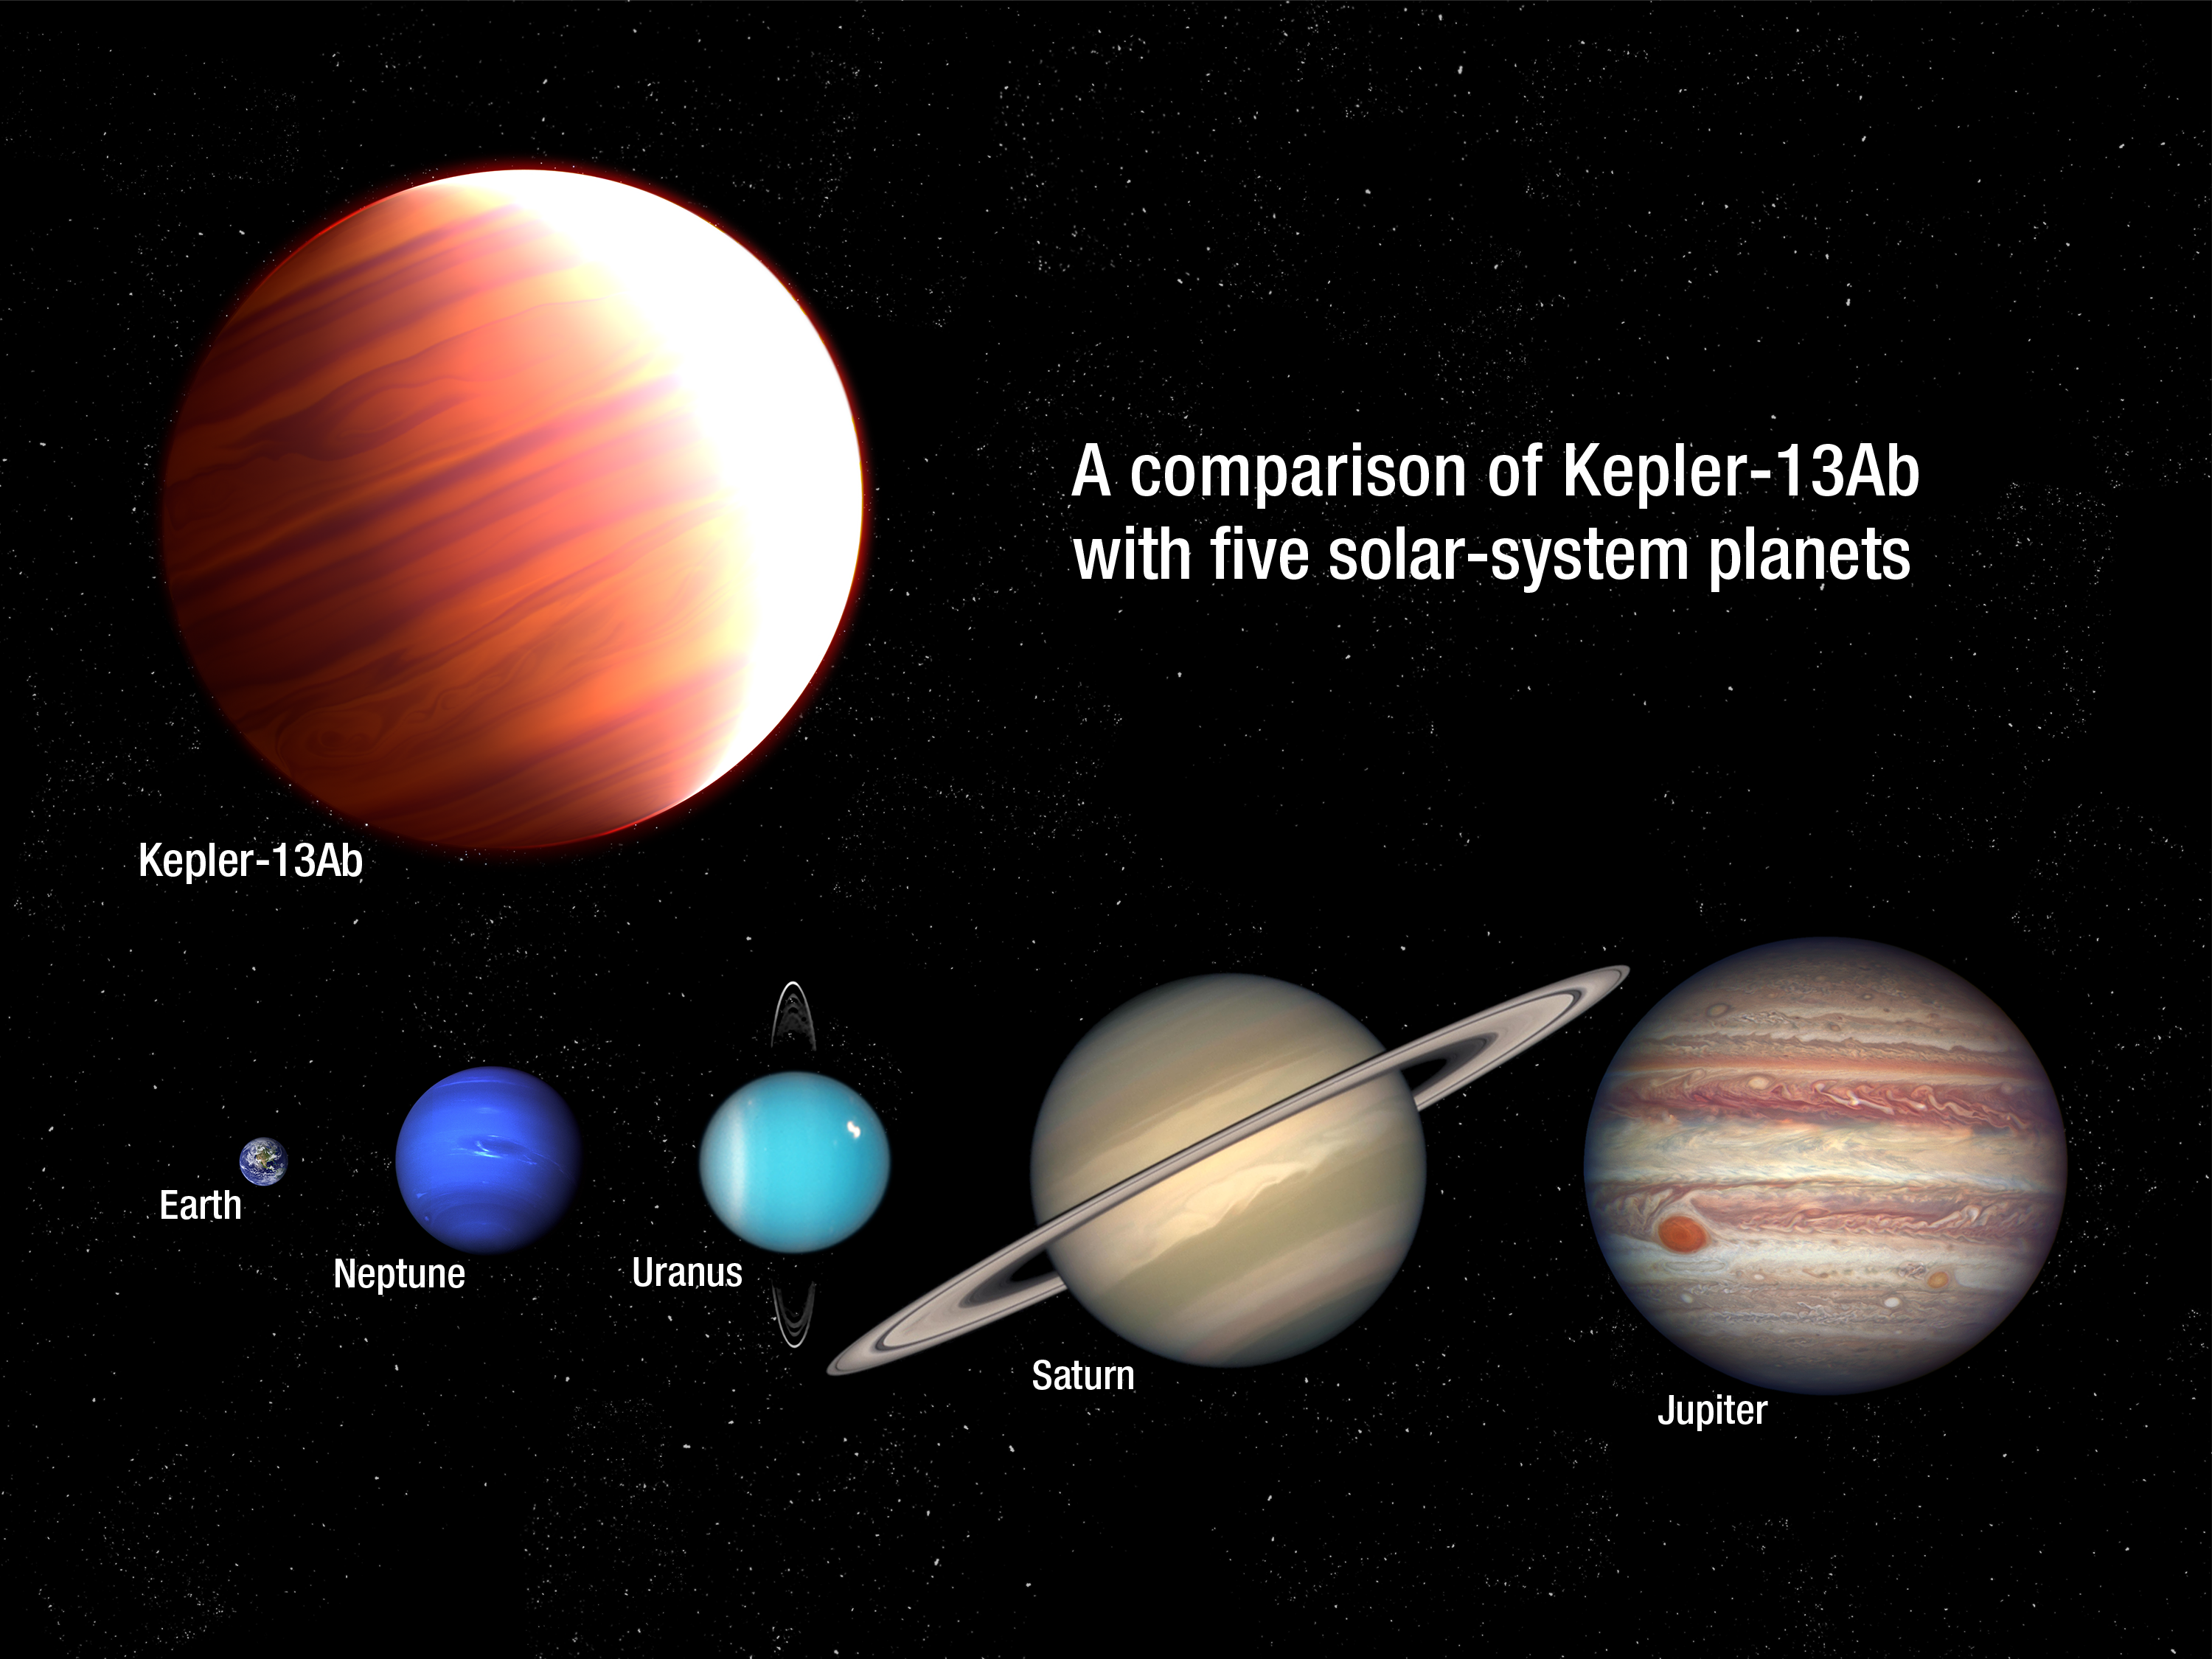

Comparison of Kepler-13Ab with five planets from our Solar System

This is an artist’s impression of the exoplanet Kepler-13Ab as compared in size to several of the planets in the Solar System. The behemoth exoplanet is six times more massive than Jupiter. Kepler-13Ab is also one of the hottest known planets, with a dayside temperature of about 2700 °C. It orbits very close to the star Kepler-13A, which lies at a distance of 1730 light-years from Earth.

Credit: NASA, ESA, and A. Feild (STScI)